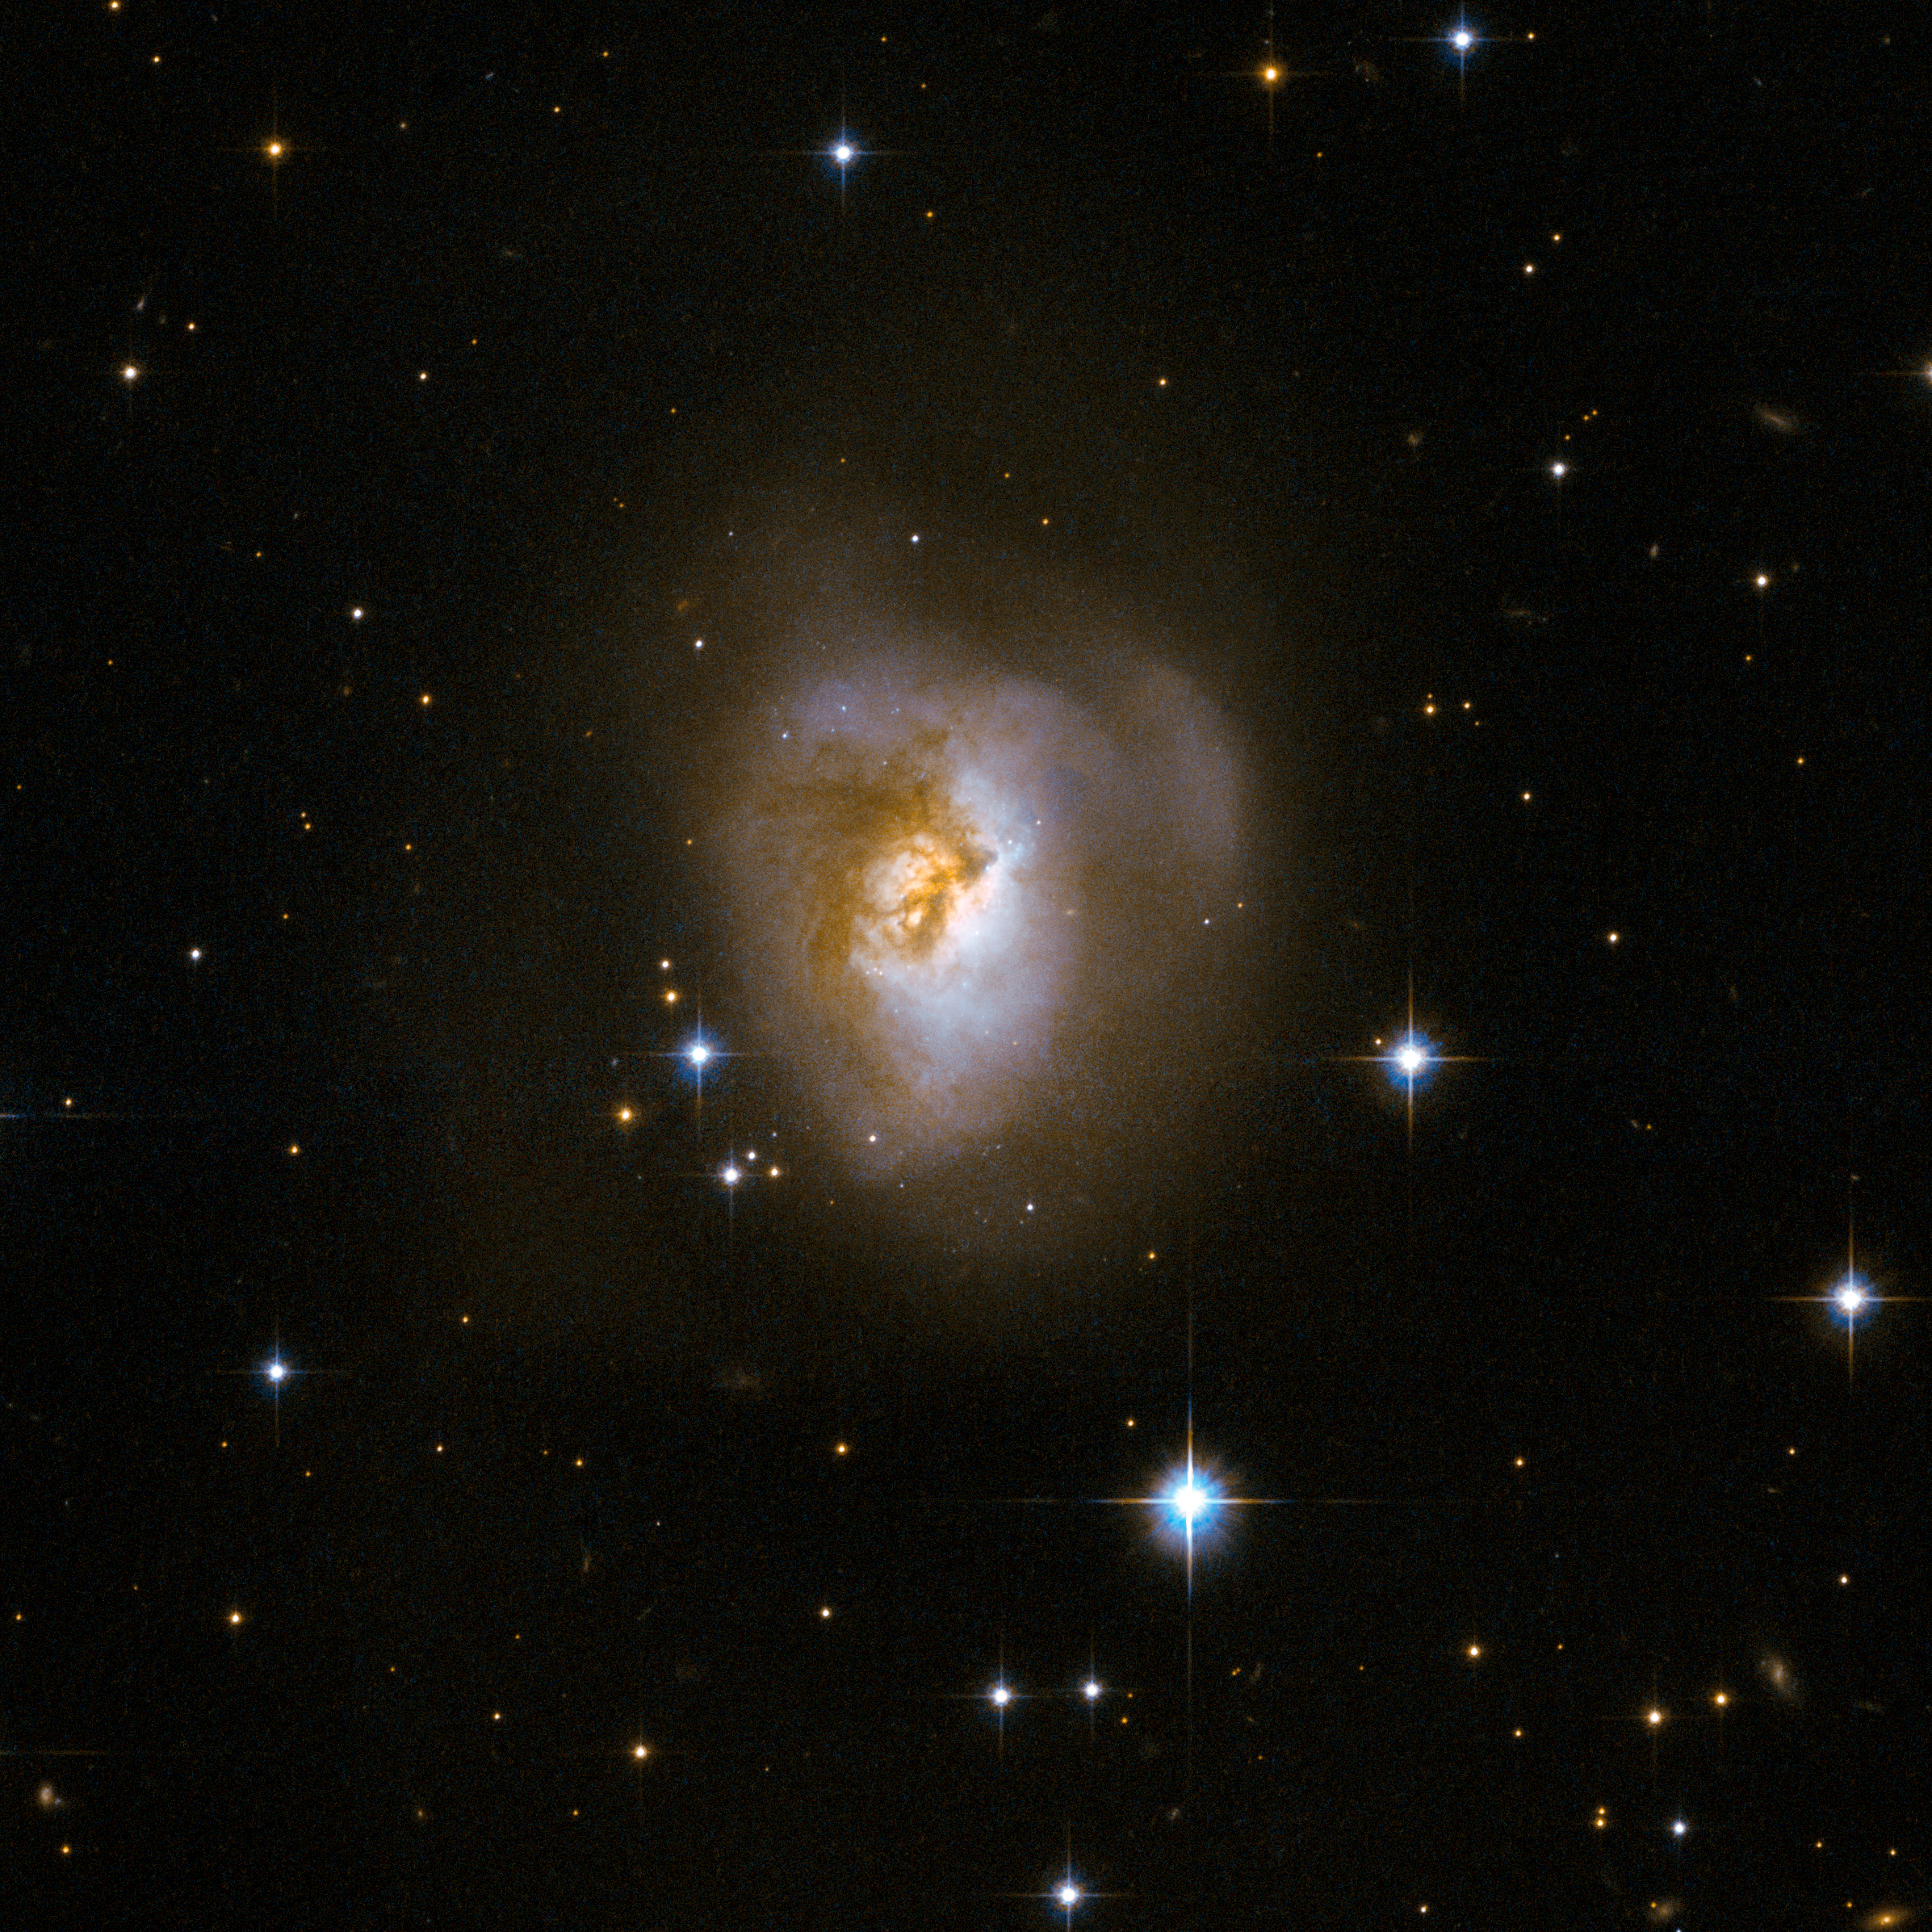

MCG+08-11-002

MCG+08-11-002 is an odd-looking galaxy with a spectacular dark band of absorbing dust in front of the galaxy's centre, making it resemble a "Black Eye". Scientists believe that it is the remnant of an earlier collision of two separate galaxies. This peculiar galaxy is at the centre of a rich field of foreground stars, close to the plane of our own Milky Way galaxy. MCG+08-11-002 is about 250 million light-years away in the constellation of Auriga, the Charioteer.

This image is part of a large collection of 59 images of merging galaxies taken by the Hubble Space Telescope and released on the occasion of its 18th anniversary on 24th April 2008.

Credit: NASA, ESA, the Hubble Heritage Team (STScI/AURA)-ESA/Hubble Collaboration and A. Evans (University of Virginia, Charlottesville/NRAO/Stony Brook University)